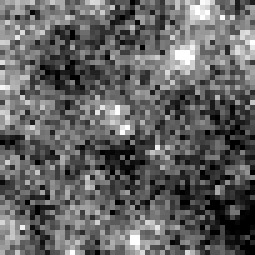

Cepheid 1 NGC 4603

Harvard Observatory astronomer Henrietta S. Leavitt makes the first crucial step in establishing the distances to nearby "spiral nebulae." Studying variable stars in the Magellanic Clouds, she discovers the presence of rhythmically pulsating stars, known as Cepheid variables, which brighten and dim over a period of days. By observing the relationship between a Cepheid's brightness and its pulsation rate, astronomers can calculate how much light it emits and then use that number to estimate its distance.

Credit: NASA & ESA